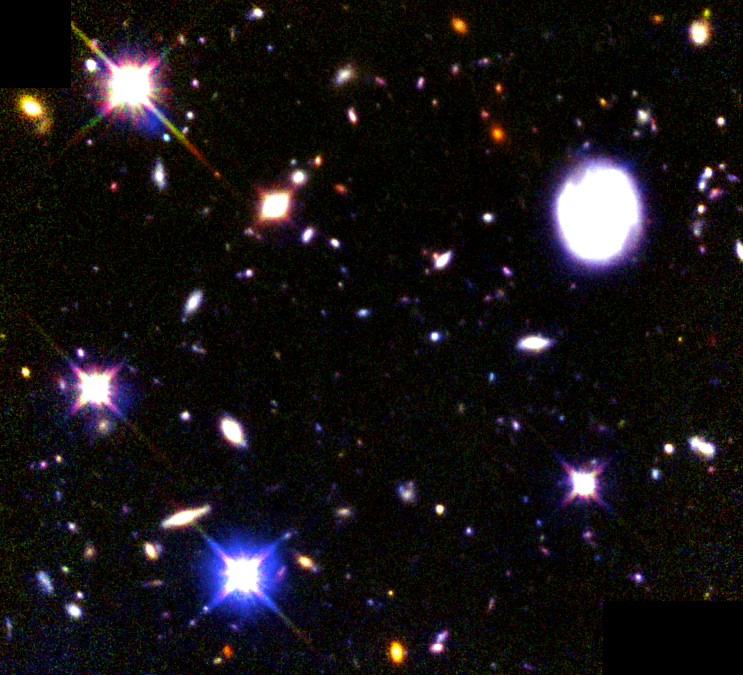

Combined Deep View of Infrared and Visible Light Galaxies

This narrow, deep view of the universe reveals a plethora of galaxies (reaching fainter than 28th magnitude), as seen in visible and infrared light by the NASA/ESA Hubble Space Telescope. The reddish galaxies are glowing in infrared light, and the bluish galaxies are glowing in visible light.

Several distinctive types of galaxies can be seen in these views: blue dwarf galaxies, disk galaxies, and very red elliptical galaxies. A bright, nearby face-on spiral galaxy appears at upper right. Some of the brightest objects in the field are foreground stars in the halo of our own Milky Way galaxy. By combining views in infrared light and visible light astronomers have a better idea of the shapes of galaxies in the remote universe, and of the fraction which are old or dust-obscured at early epochs.

Credit: R. Williams (STScI) and the HDF-South team, and NASA/ESA